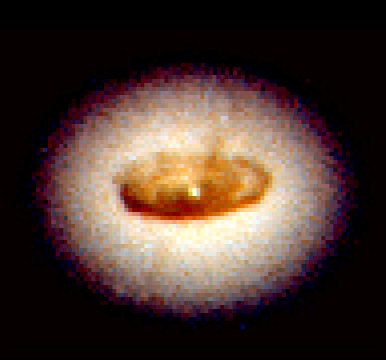

Core of galaxy NGC 4261

This is a Hubble Space Telescope image of an 800-light-year-wide spiral-shaped disk of dust fueling a massive black hole in the centreof galaxy, NGC 4261, located 100 million light-years away in the direction of the constellation Virgo.

Credit: L. Ferrarese (Johns Hopkins University) and NASA/ESA